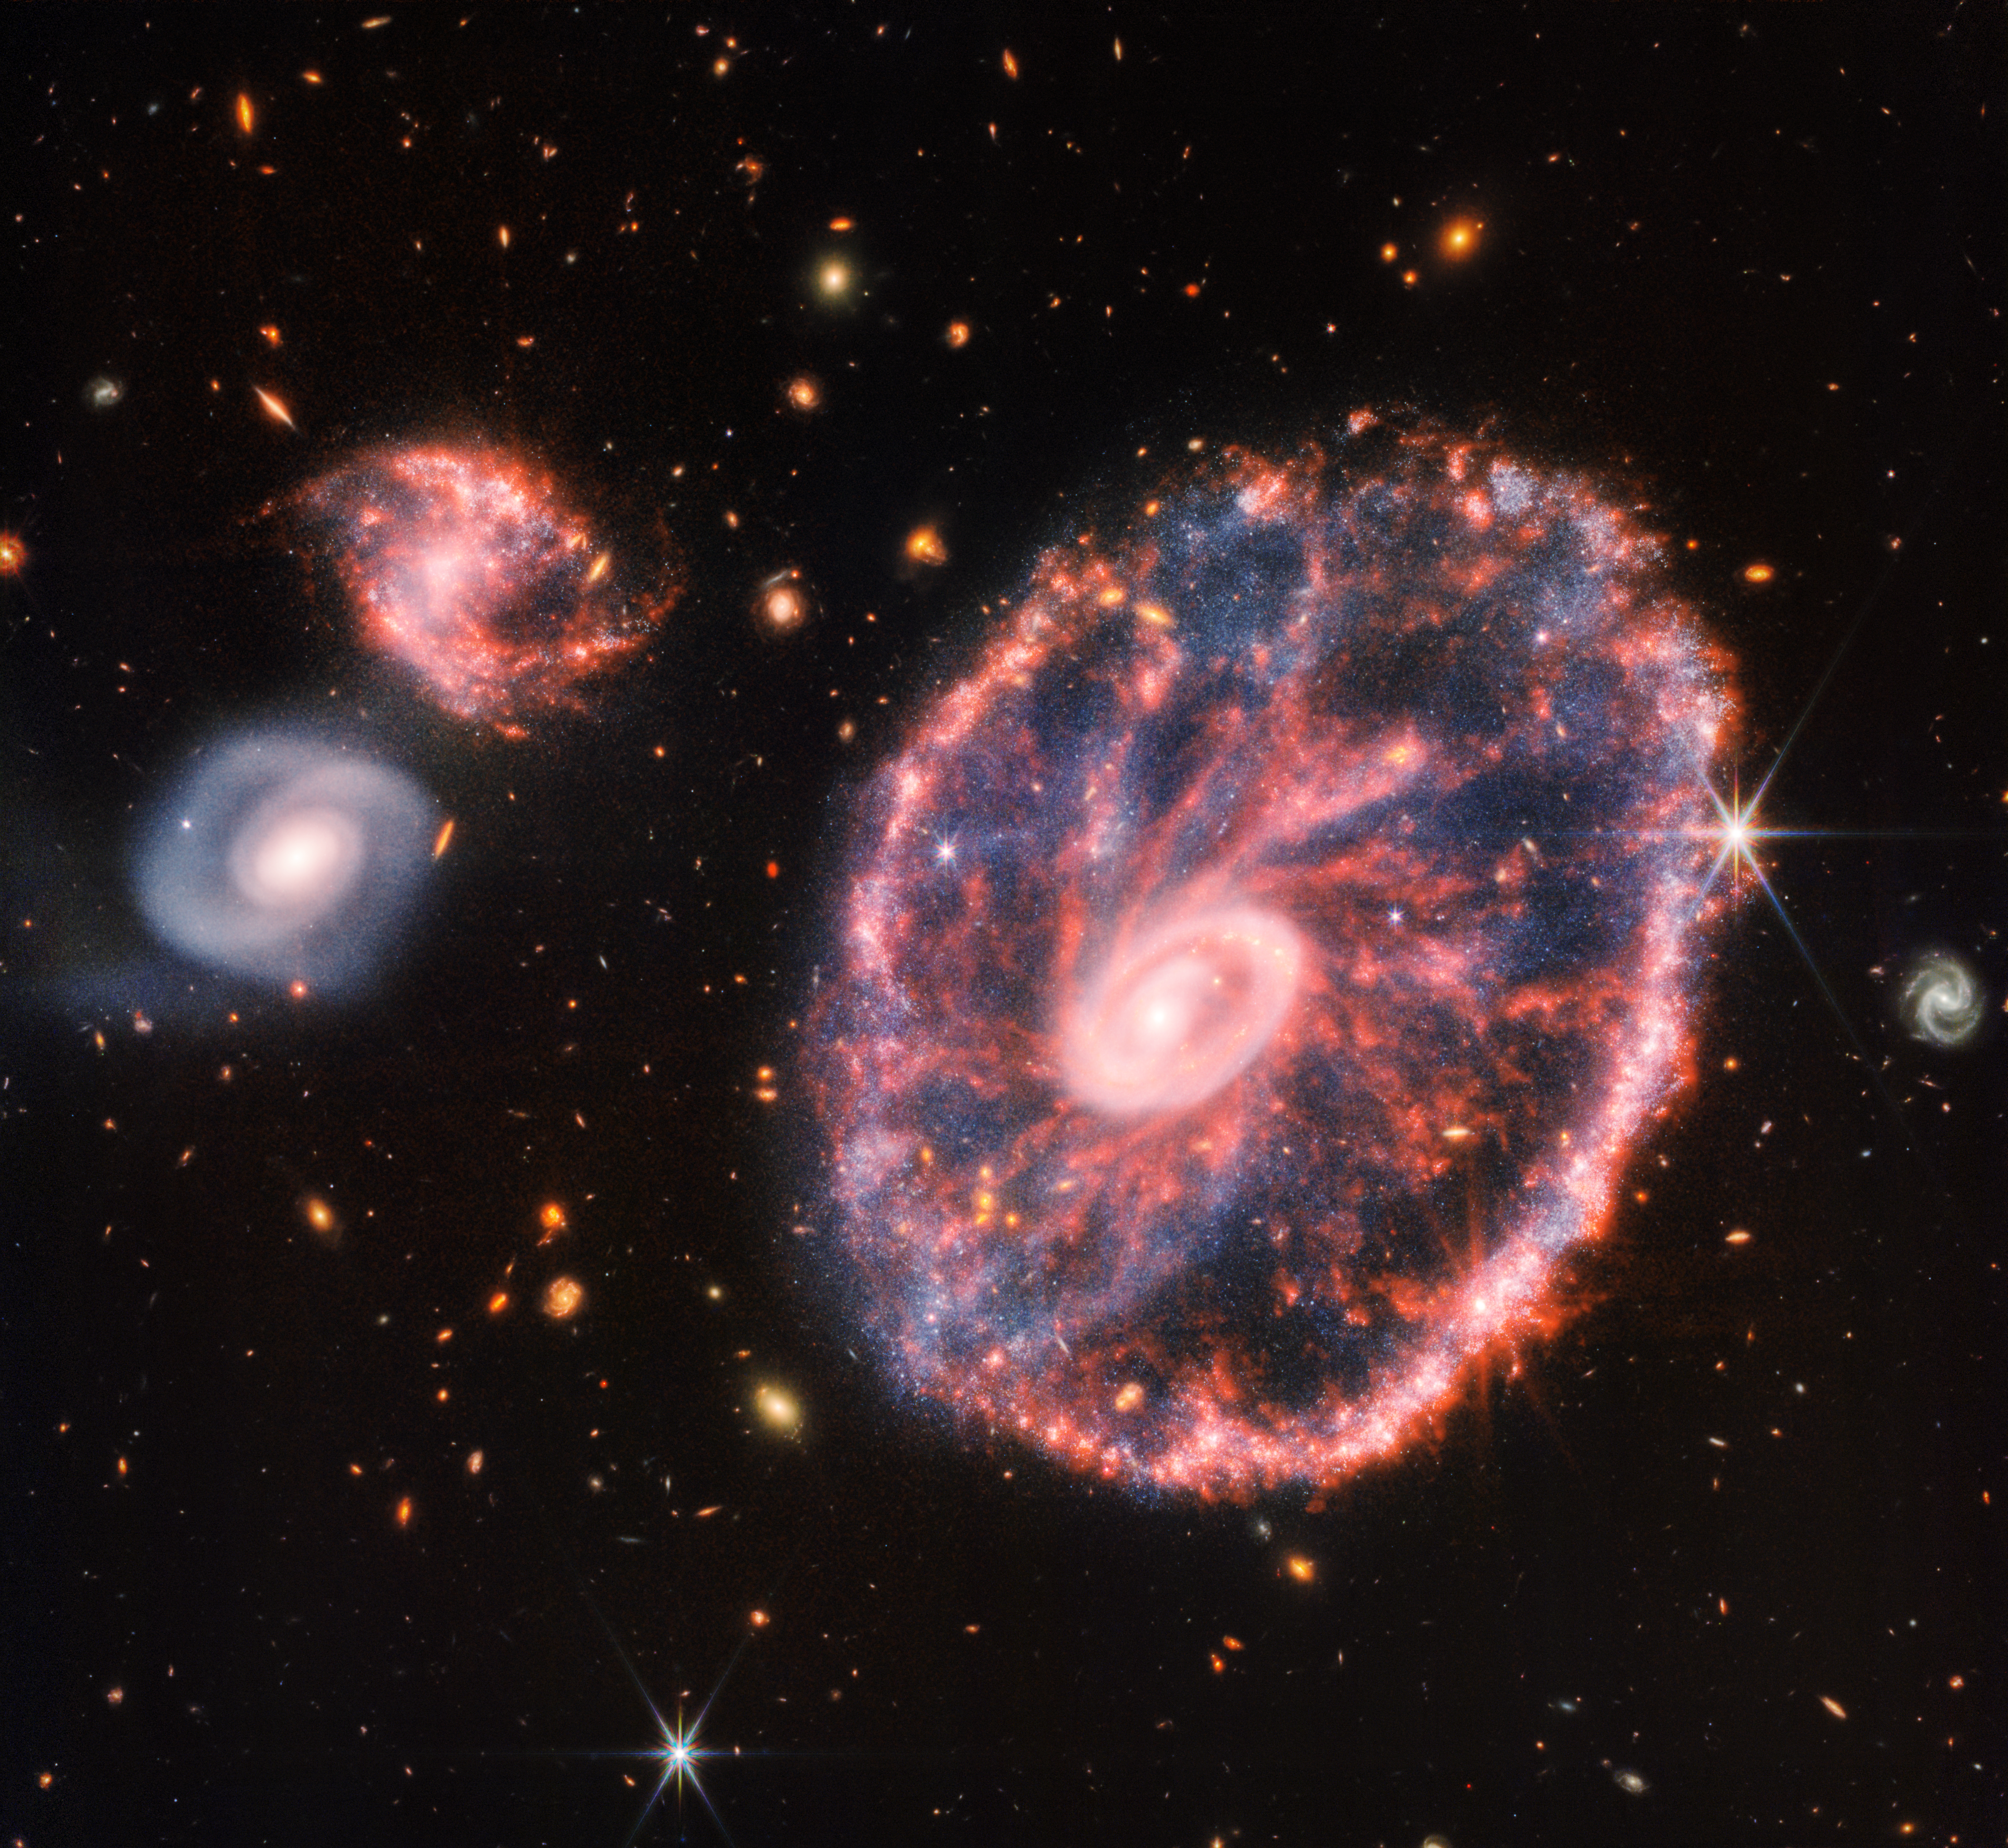

Cartwheel Galaxy (NIRCam and MIRI Composite Image)

This image of the Cartwheel and its companion galaxies is a composite from Webb’s Near-Infrared Camera (NIRCam) and Mid-Infrared Instrument (MIRI), which reveals details that are difficult to see in the individual images alone.

This galaxy formed as the result of a high-speed collision that occurred about 400 million years ago. The Cartwheel is composed of two rings, a bright inner ring and a colourful outer ring. Both rings expand outward from the centre of the collision like shockwaves.

However, despite the impact, much of the character of the large, spiral galaxy that existed before the collision remains, including its rotating arms. This leads to the “spokes” that inspired the name of the Cartwheel Galaxy, which are the bright red streaks seen between the inner and outer rings. These brilliant red hues, located not only throughout the Cartwheel, but also the companion spiral galaxy at the top left, are caused by glowing, hydrocarbon-rich dust.

In this near- and mid-infrared composite image, MIRI data are coloured orange while NIRCam data are coloured blue, yellow, and red. Amidst the red swirls of dust, there are many individual blue dots, which represent individual stars or pockets of star formation. NIRCam also defines the difference between the older star populations and dense dust in the core and the younger star populations outside of it.

Webb’s observations capture Cartwheel in a very transitory stage. The form that the Cartwheel Galaxy will eventually take, given these two competing forces, is still a mystery. However, this snapshot provides perspective on what happened to the galaxy in the past and what it will do in the future.

NIRCam was built by a team at the University of Arizona and Lockheed Martin’s Advanced Technology Center.

MIRI was contributed by ESA and NASA, with the instrument designed and built by a consortium of nationally funded European Institutes (the MIRI European Consortium) in partnership with JPL and the University of Arizona.

Credit: NASA, ESA, CSA, STScI